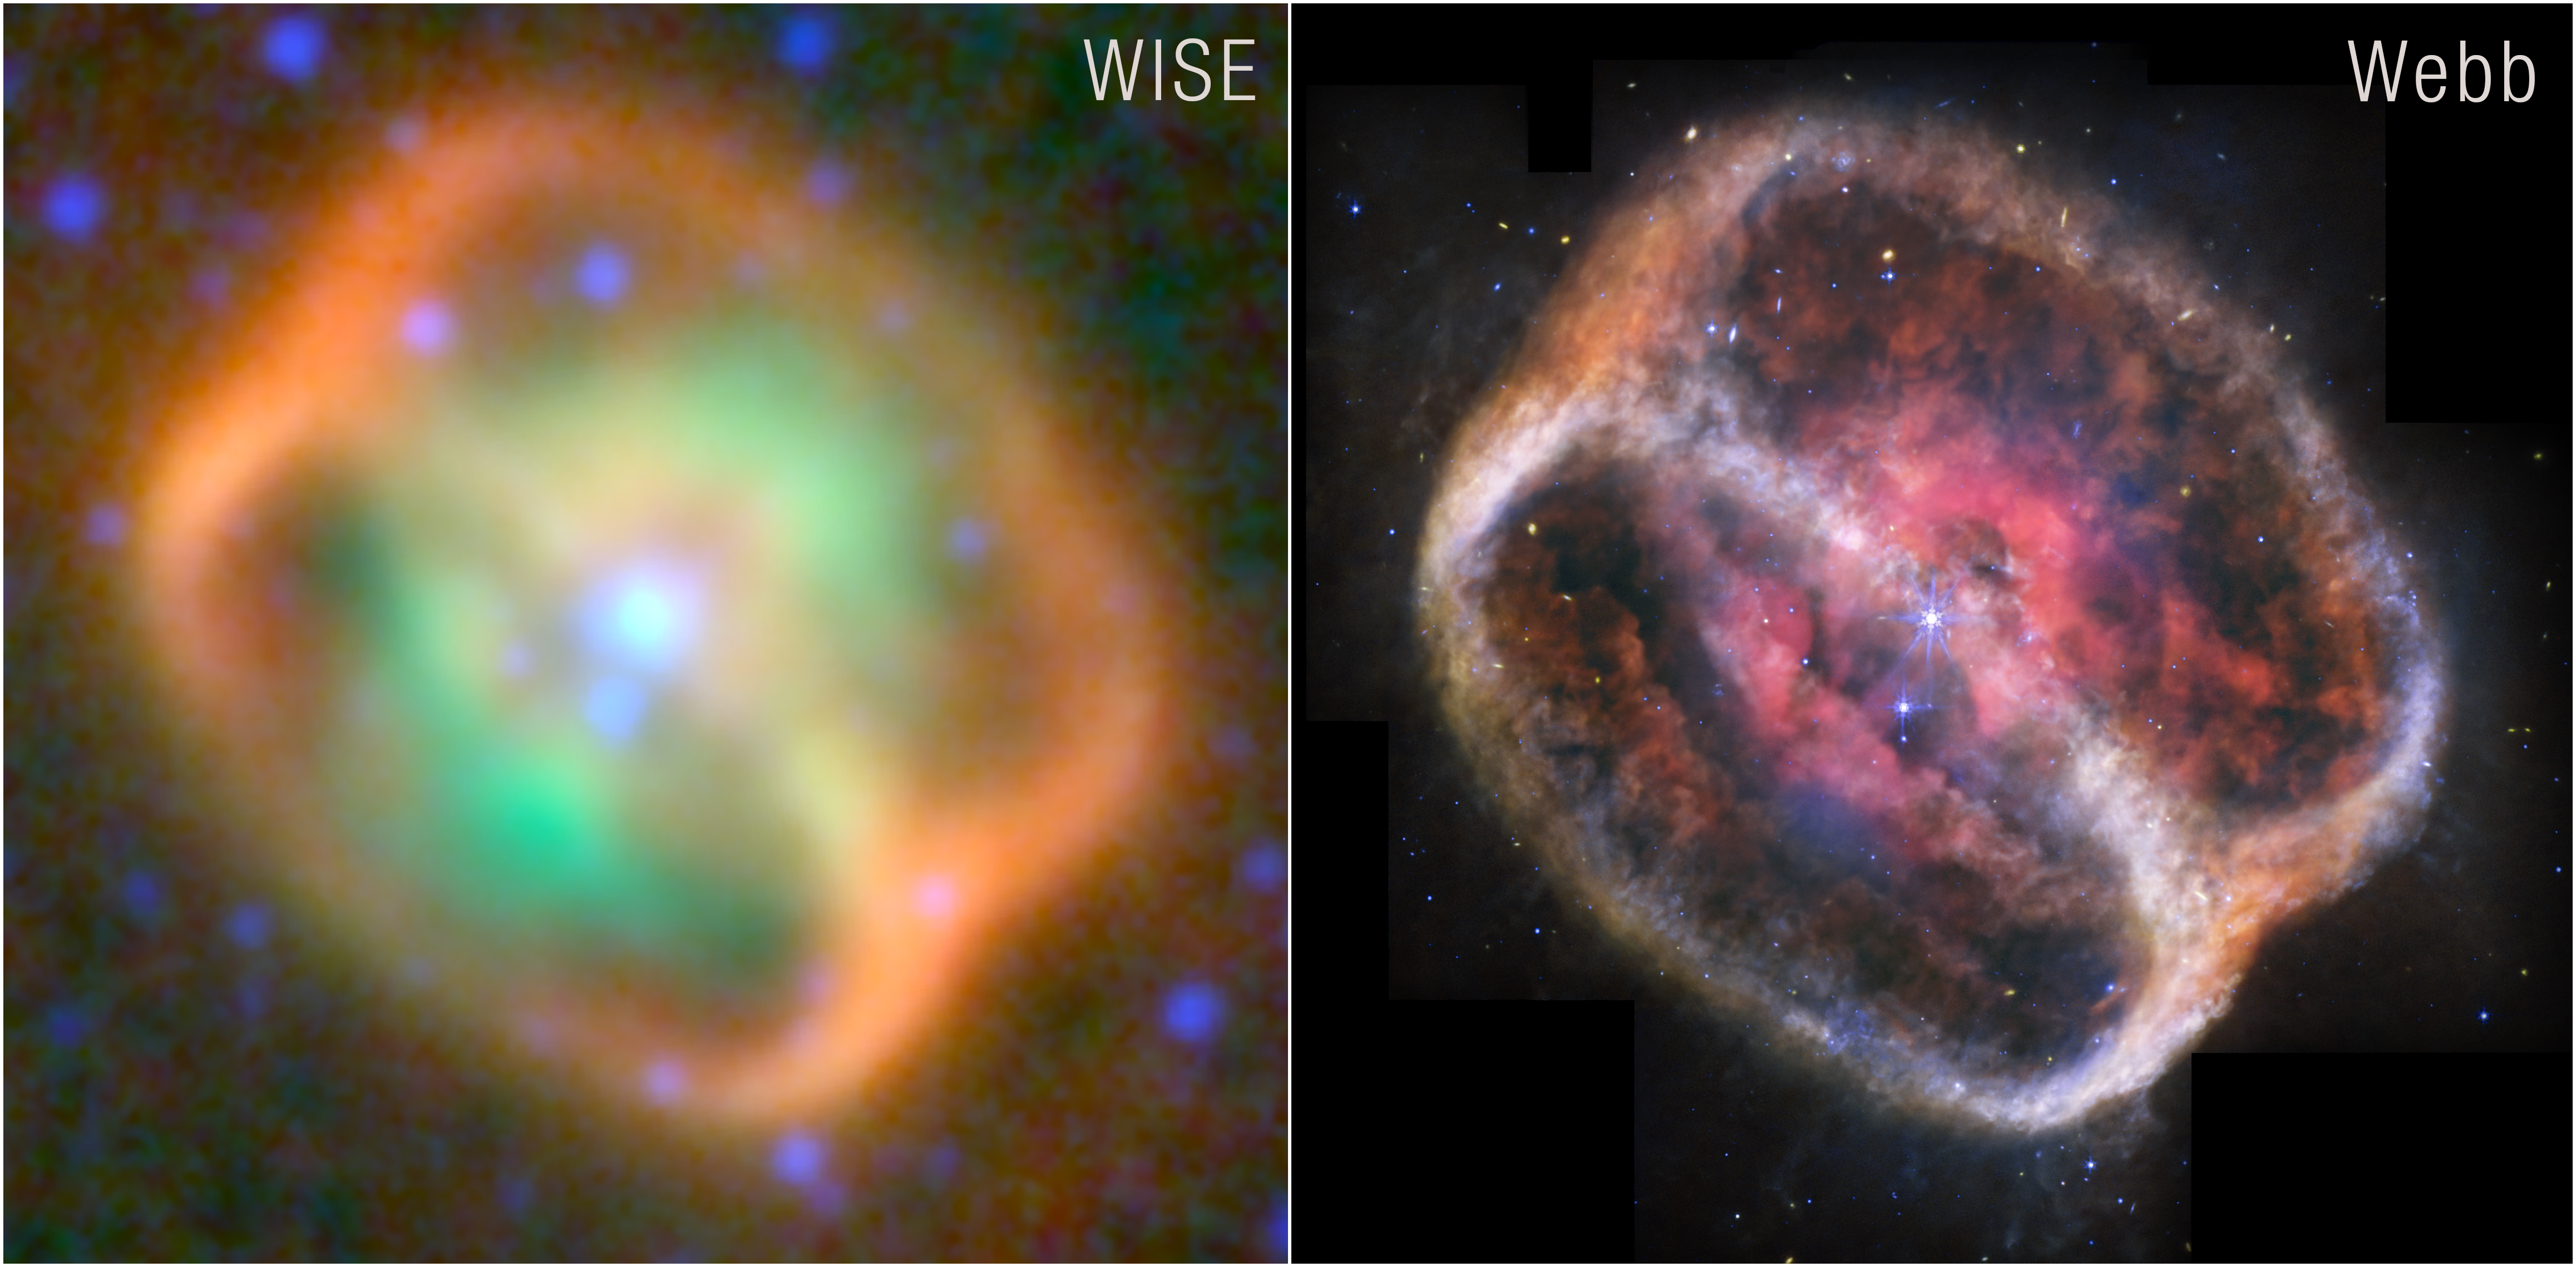

Planetary Nebula NGC 1514 (WISE and Webb Images Side by Side)

Two infrared views of NGC 1514. At left is an observation from NASA’s Wide-field Infrared Survey Explorer (WISE). At right is a more refined image from NASA's James Webb Space Telescope.

Credit: NASA, ESA, CSA, STScI, NASA-JPL, Caltech, UCLA, Michael Ressler (NASA-JPL), Dave Jones (IAC)